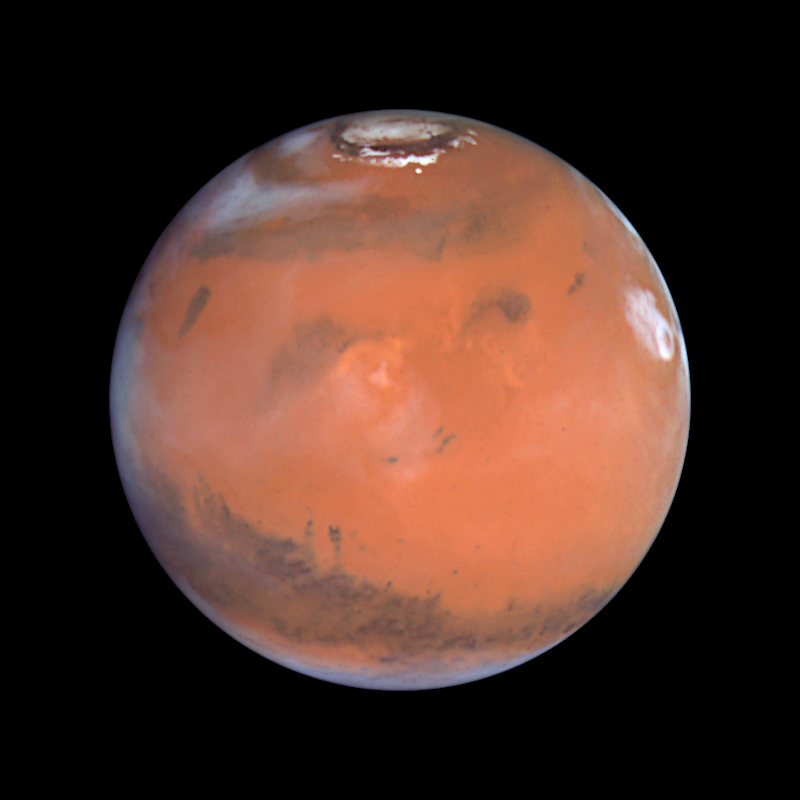

Mars at Opposition (the Elysium Region)

This image is centered near another volcanic region known as Elysium. This area shows many small, dark markings that have been observed by the Hubble telescope and other spacecraft to change as a result of the movement of sand and dust across the Martian surface. In the upper left of this image, at high northern latitudes, a large chevron-shaped area of water ice clouds mark a storm front. Along the right limb, a large cloud system has formed around the Olympus Mons volcano.

Credit: Steve Lee (University of Colorado), Jim Bell (Cornell University), Mike Wolff (Space Science Institute), and NASA/ESA